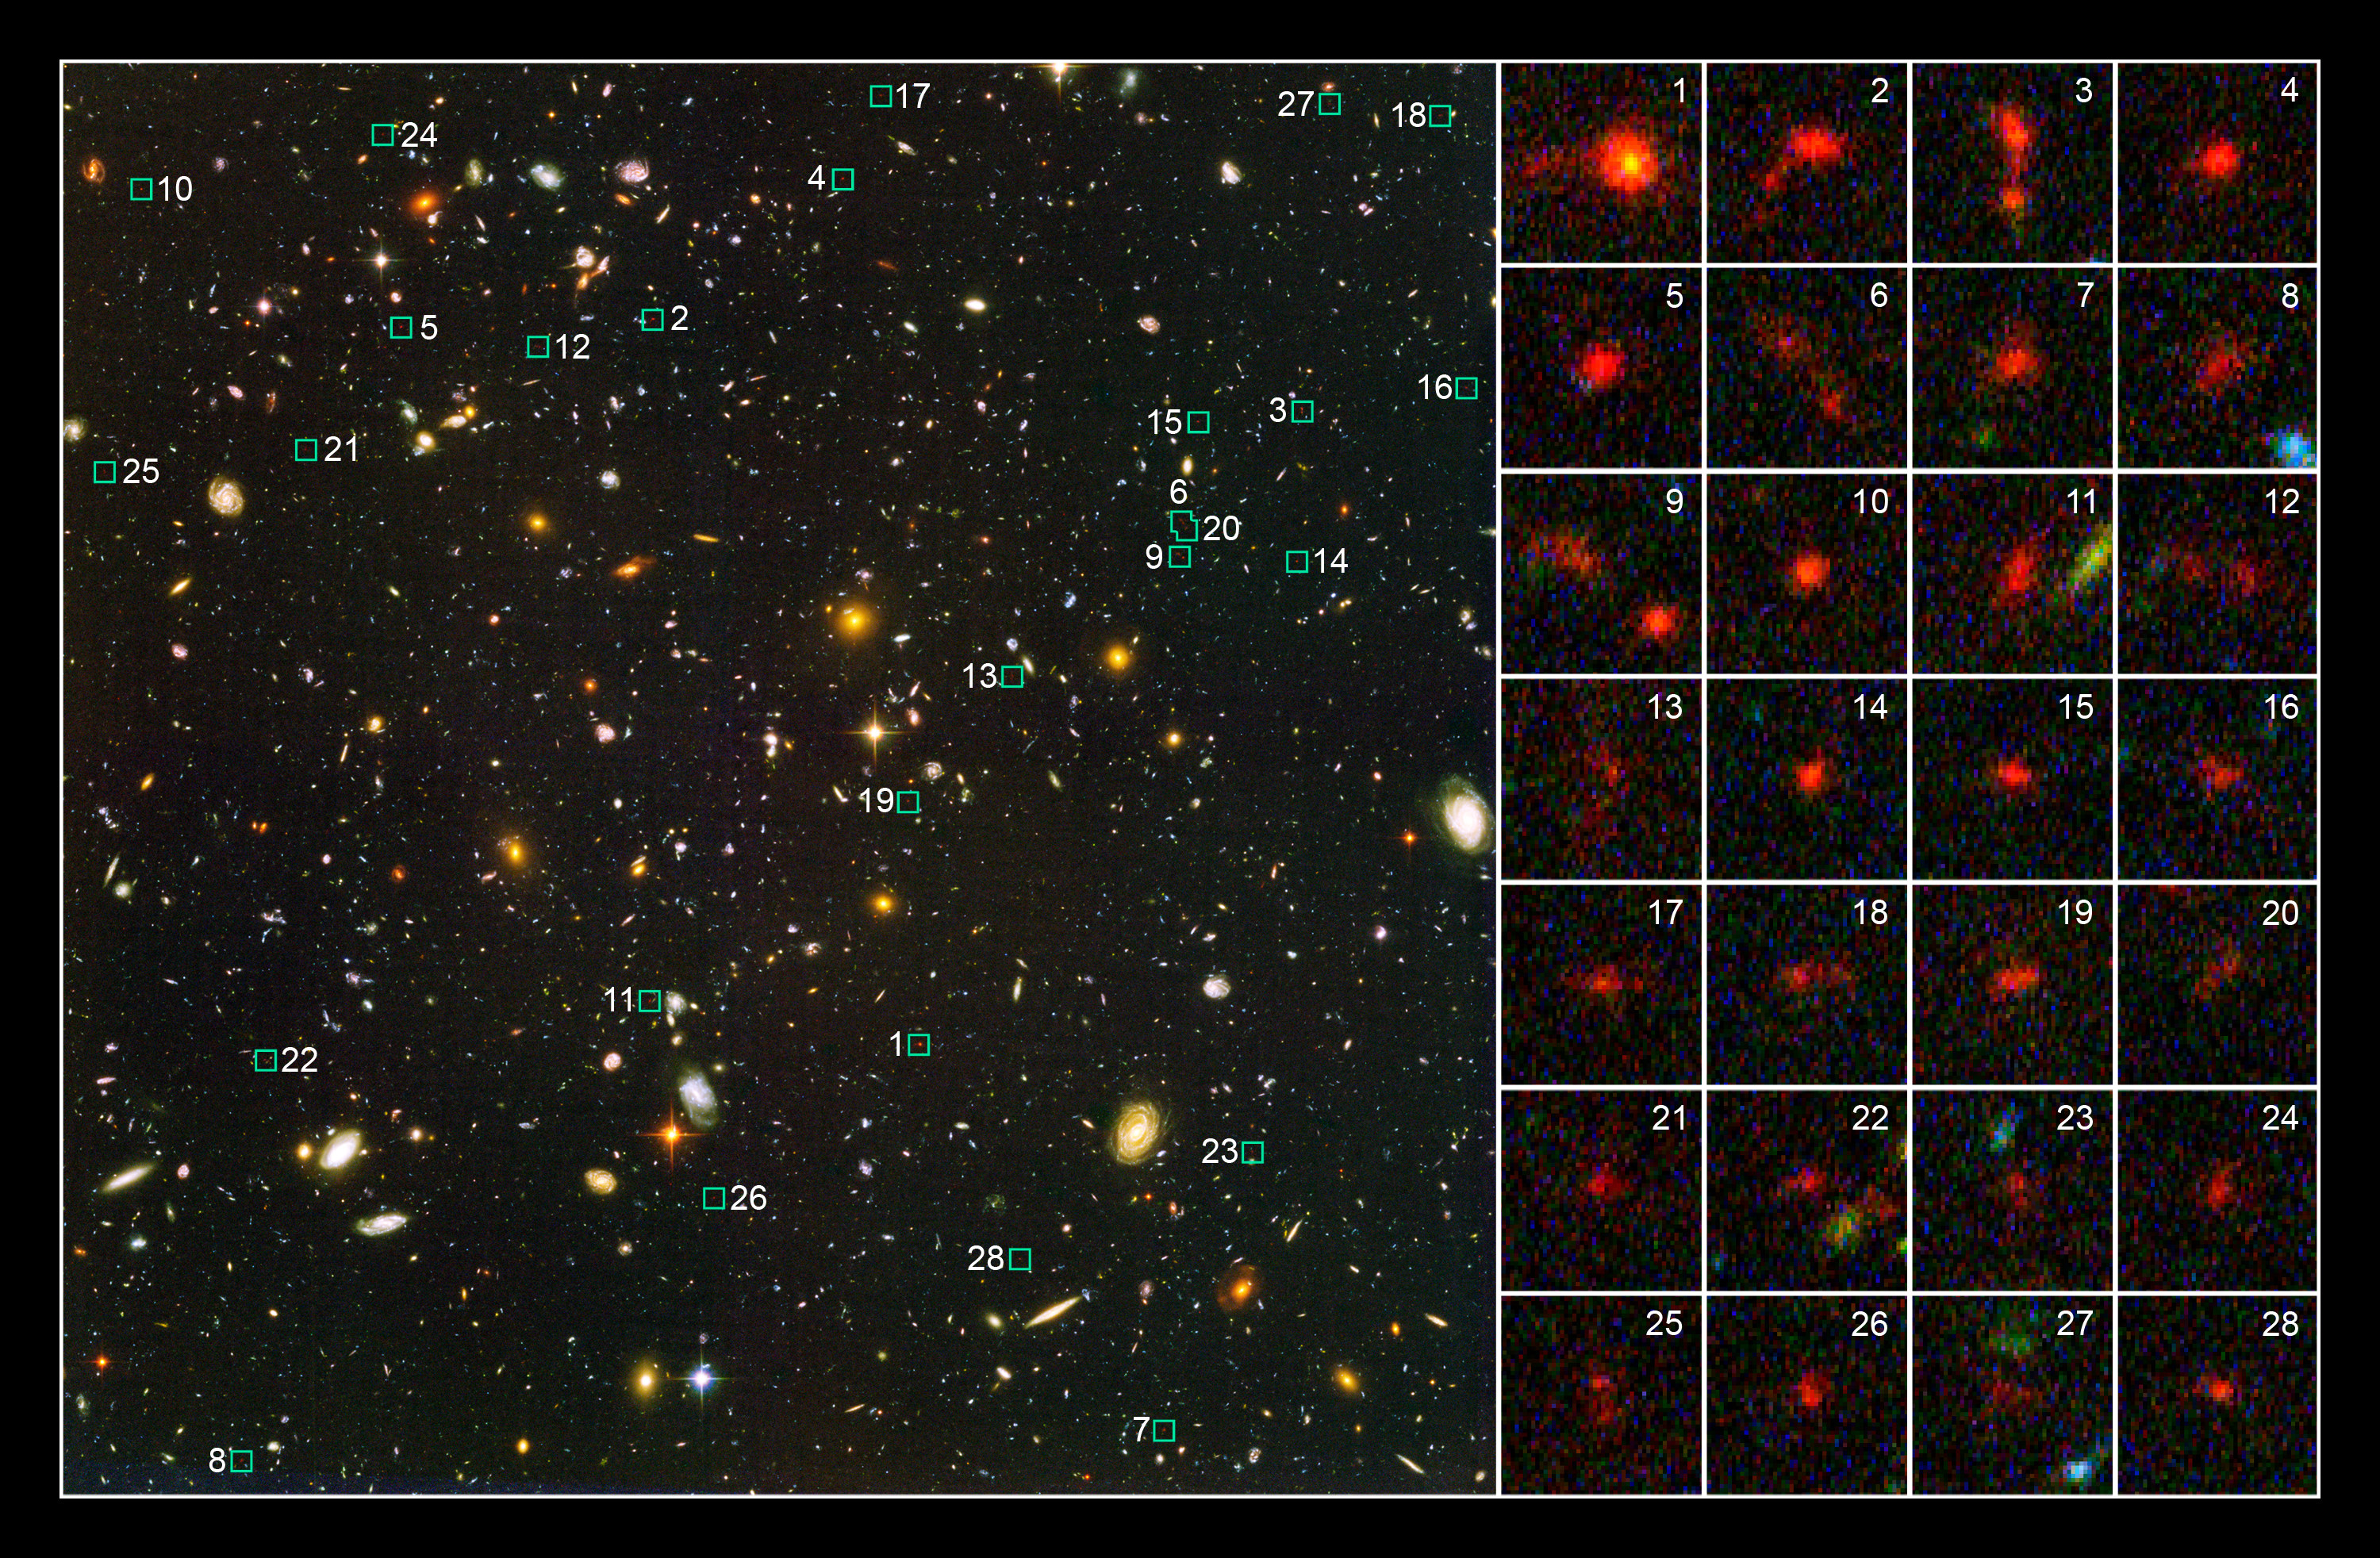

Probing the distant Universe for young galaxies

This Hubble Space Telescope image shows 28 of the more than 500 young galaxies that existed when the universe was less than 1 billion years old. The galaxies were uncovered in a study of two of the most distant surveys of the cosmos, the Hubble Ultra Deep Field (HUDF), completed in 2004, and the Great Observatories Origins Deep Survey (GOODS), made in 2003.

Just a few years ago, astronomers had not spotted any galaxies that existed significantly less than 1 billion years after the Big Bang. The galaxies spied in the HUDF and GOODS surveys are blue galaxies brimming with star birth.

The large image at left shows the Hubble Ultra Deep Field, taken by the Hubble telescope. The numbers next to the small blue boxes correspond to close-up views of 28 of the newly found galaxies at right. The galaxies in the postage-stamp size images appear red because of their tremendous distance from Earth. The blue light from their young stars took nearly 13 billion years to arrive at Earth. During the journey, the blue light was shifted to red light due to the expansion of space.

Credit: NASA, ESA, R. Bouwens and G. Illingworth (University of California, Santa Cruz, USA)